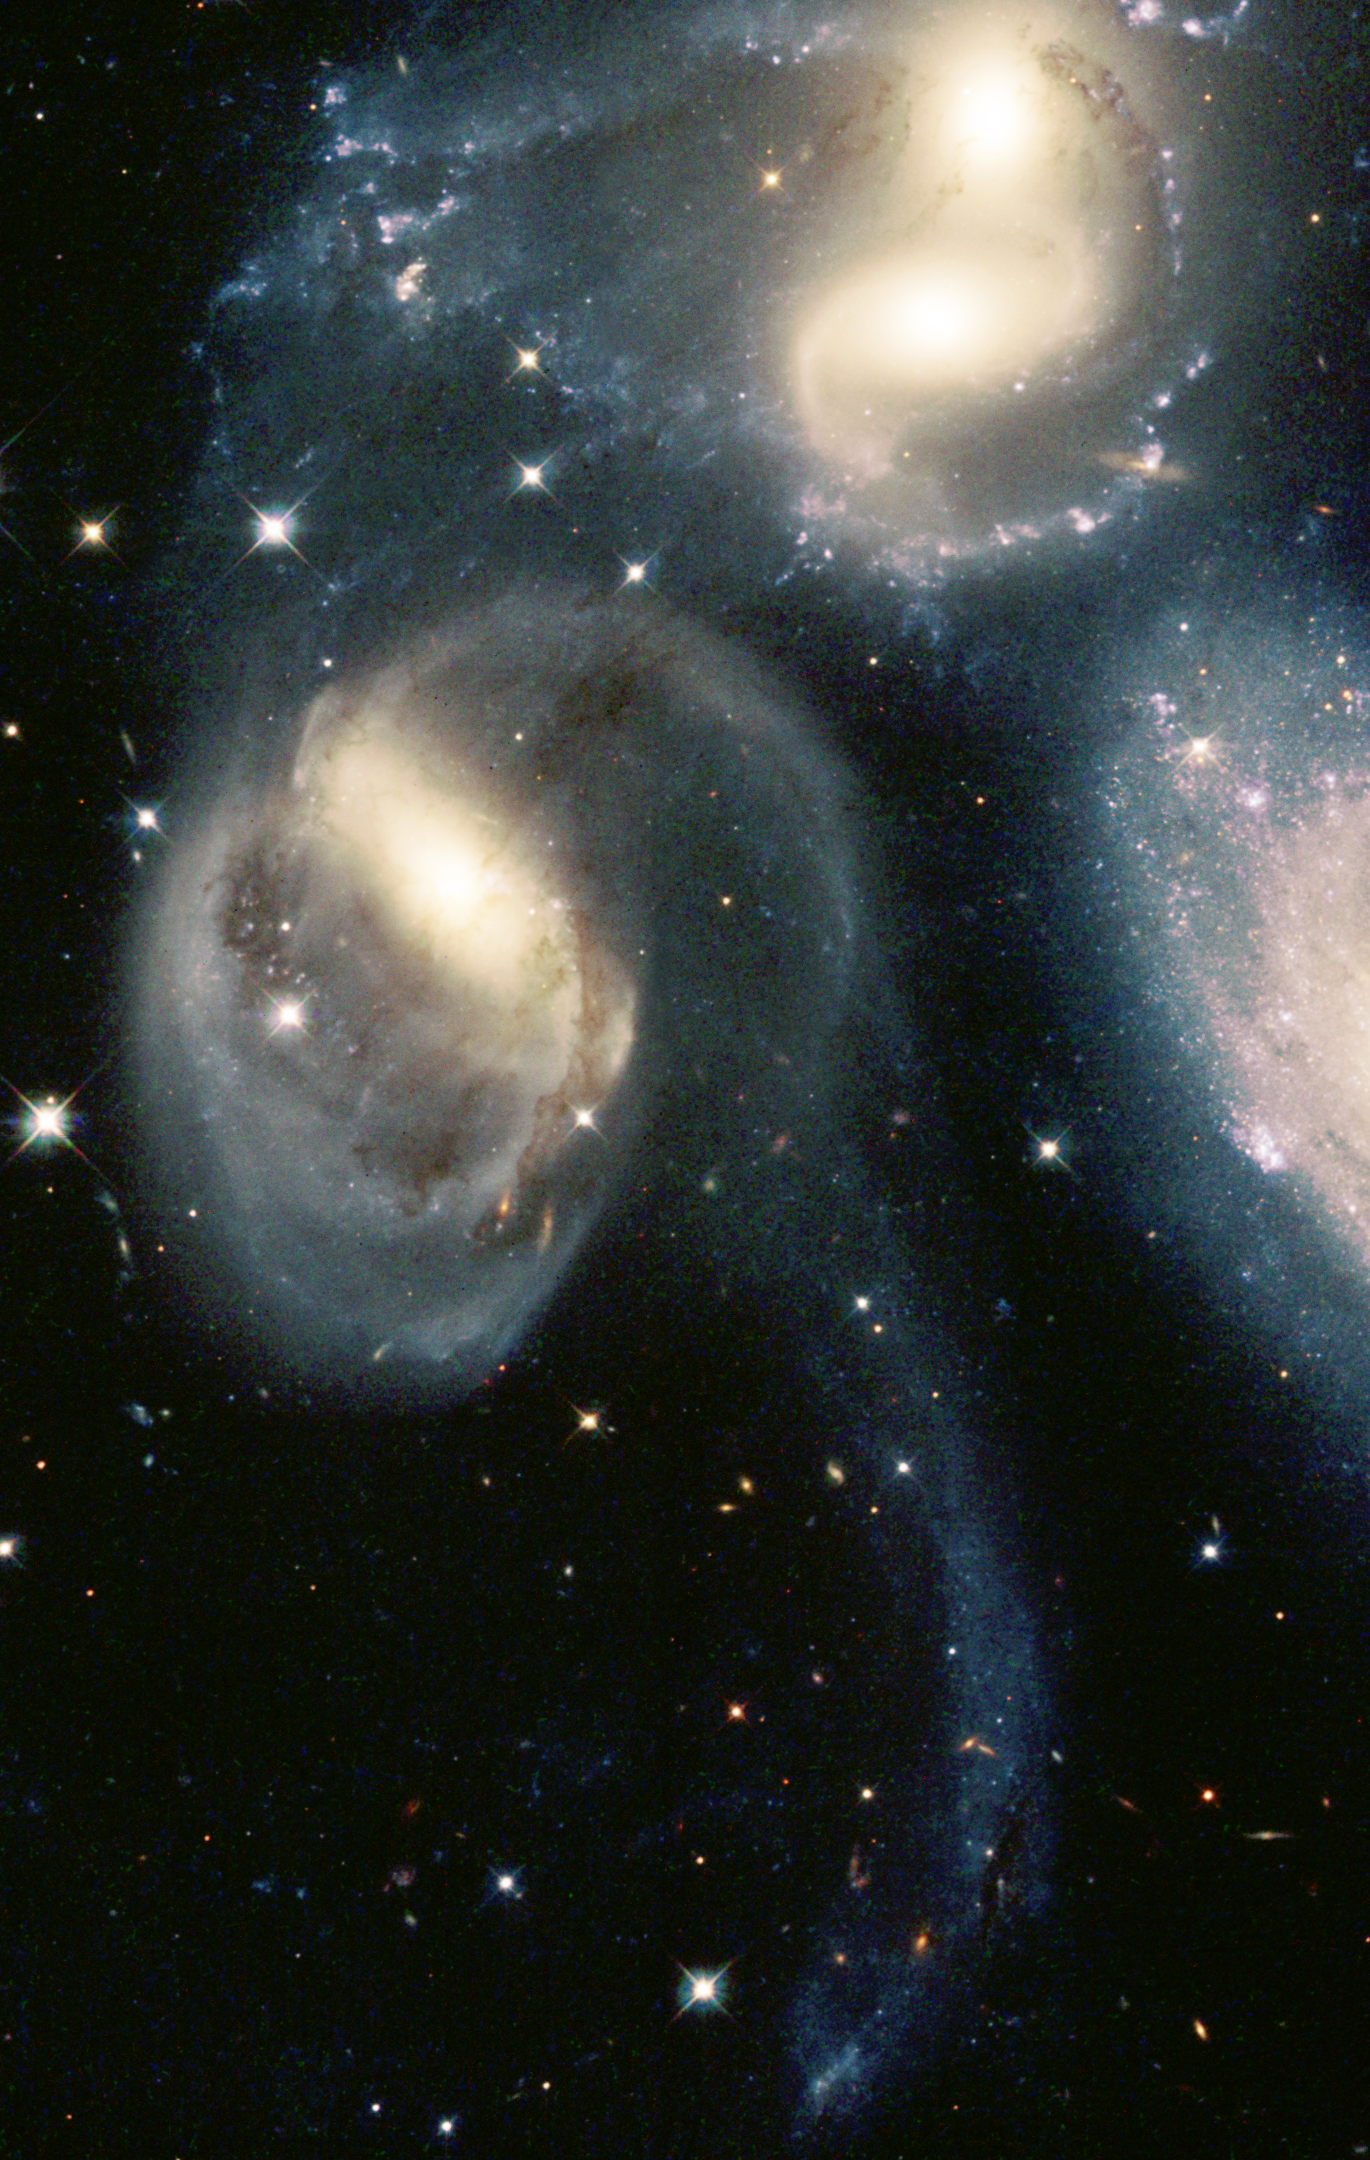

Star Clusters Born in the Wreckage of Cosmic Collisions

In the beginning of the 1946 holiday film classic 'It's a Wonderful Life, ' angelic figures take on the form of a famous group of compact galaxies known as Stephan's Quintet. In reality, these galaxies aren't so heavenly. Pictures from the Hubble telescope show that Stephan's Quintet has been doing some devilish things. At least two of the galaxies have been involved in high-speed, hit-and-run accidents, which have ripped stars and gas from neighboring galaxies and tossed them into space. But the galactic carnage also has spawned new life. Arising from the wreckage are more than 100 star clusters and several dwarf galaxies. The young clusters, each harboring up to millions of stars, are shown clearly for the first time in pictures taken by Hubble's Wide Field and Planetary Camera 2.

Credit: NASA/ESA, Jayanne English (University of Manitoba), Sally Hunsberger (Pennsylvania State University), Zolt Levay ( Space Telescope Science Institute), Sarah Gallagher (Pennsylvania State University), and Jane Charlton (Pennsylvania State University)